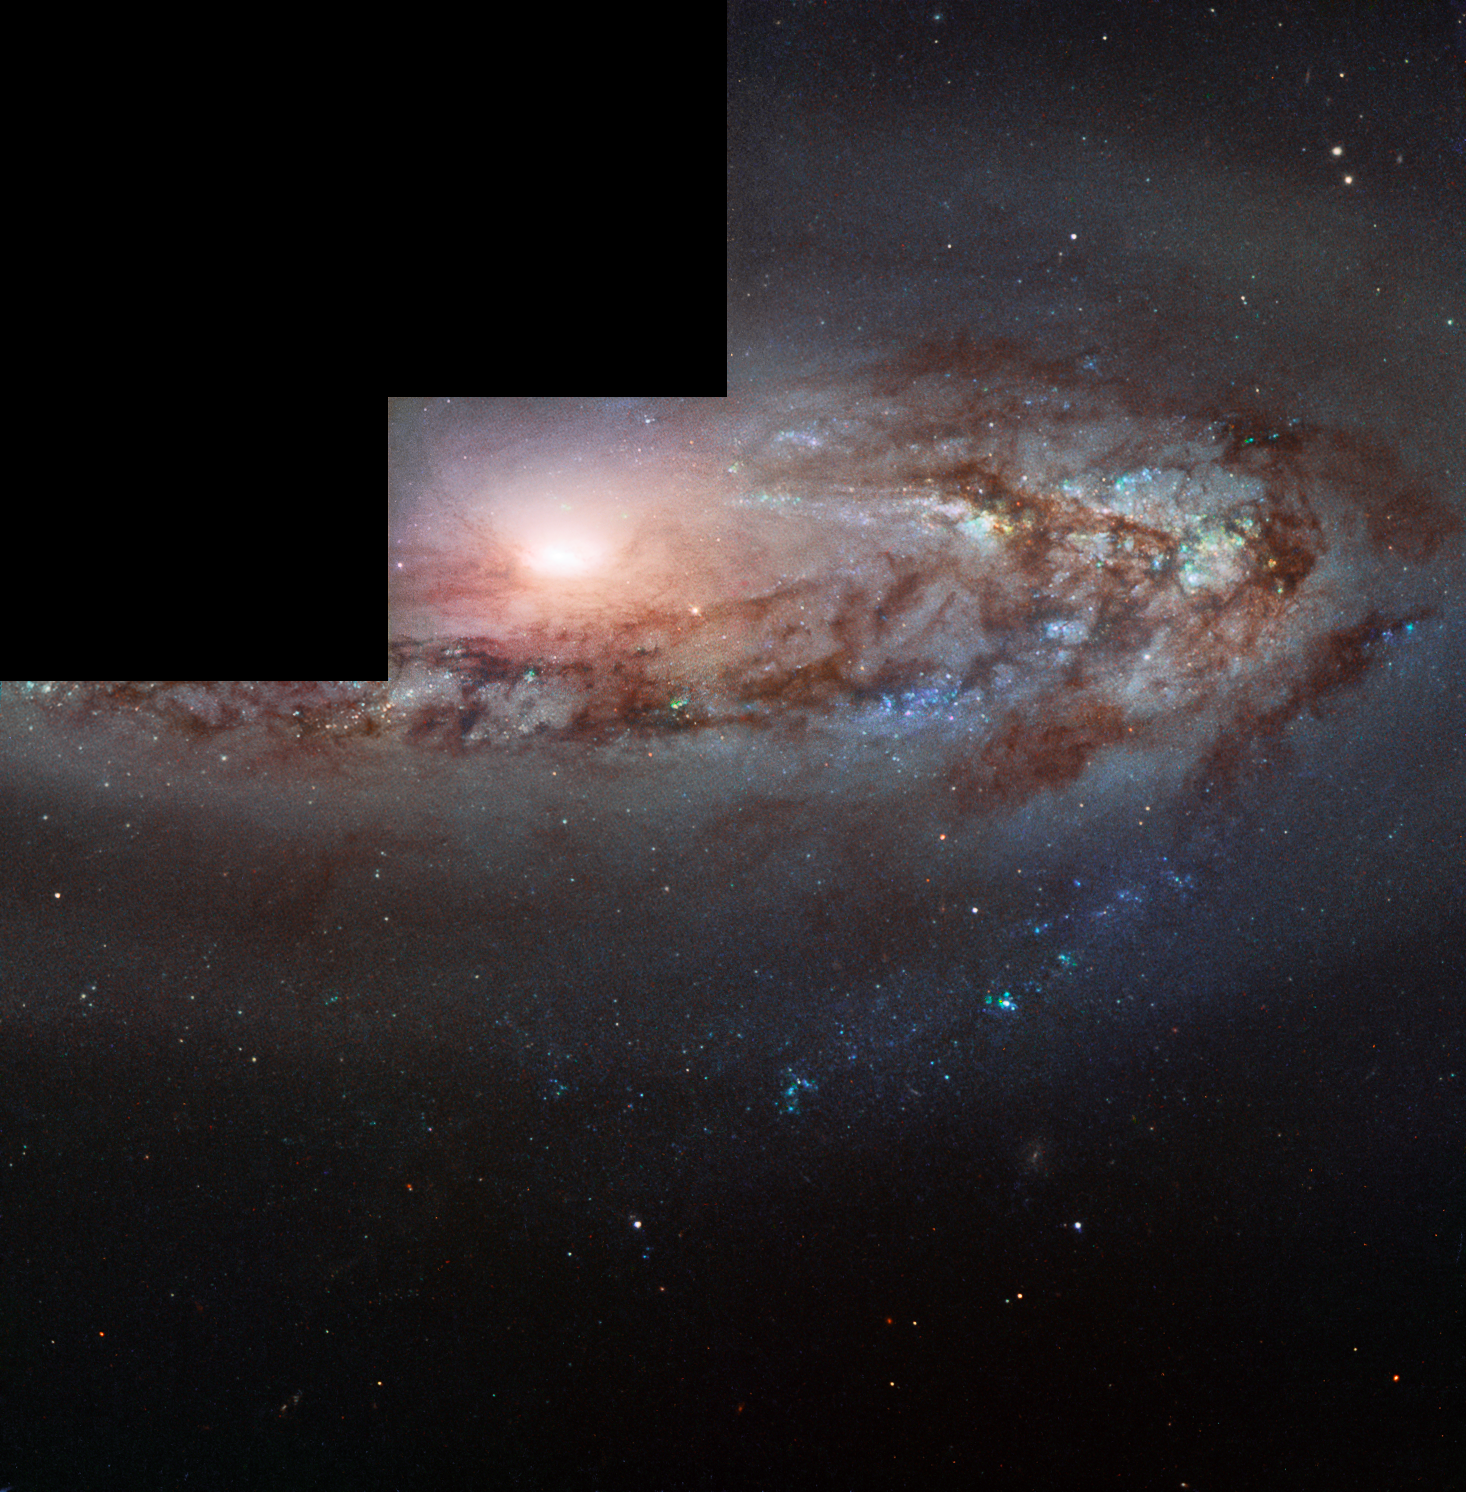

Come a little closer

This Picture of the Week stars Messier 90, a beautiful spiral galaxy located roughly 60 million light-years from the Milky Way in the constellation of Virgo (The Virgin). The galaxy is part of the Virgo Cluster, a gathering of galaxies that is over 1200 strong.

This image combines infrared, ultraviolet, and visible light gathered by the Wide Field and Planetary Camera 2 on the NASA/ESA Hubble Space Telescope. This camera was operational between 1994 and 2010, producing images with an unusual staircase-like shape as seen here. This is because the camera was made up of four light detectors with overlapping fields of view, one of which gave a higher magnification than the other three. When the four images are combined together in one picture, the high magnification image needs to be reduced in size in order for the image to align properly. This produces an image with a layout that looks like three steps.

Messier 90 is remarkable; it is one of the few galaxies seen to be travelling toward the Milky Way, not away from it. The galaxy’s light reveals this incoming motion in that it is blueshifted. In simple terms, the galaxy is compressing the wavelength of its light as it moves towards us, like a slinky being squashed when you push on one end. This increases the frequency of the light and shifts it towards the blue end of the spectrum. As our Universe is expanding, almost all of the galaxies we see in the Universe are moving away from us, and we therefore see their light as redshifted, but Messier 90 appears to be a rare exception.

Astronomers think that this blueshift is likely caused by the cluster’s colossal mass accelerating its members to high velocities on bizarre and peculiar orbits, sending them whirling around on odd paths that take them both towards and away from us over time. While the cluster itself is moving away from us, some of its constituent galaxies, such as Messier 90, are moving faster than the cluster as a whole, making it so that from Earth we see the galaxy heading towards us. However, some are also moving in the opposite direction within the cluster, and thus seem to be streaking away from us at very high velocity.

Credit: ESA/Hubble & NASA, W. Sargent et al.